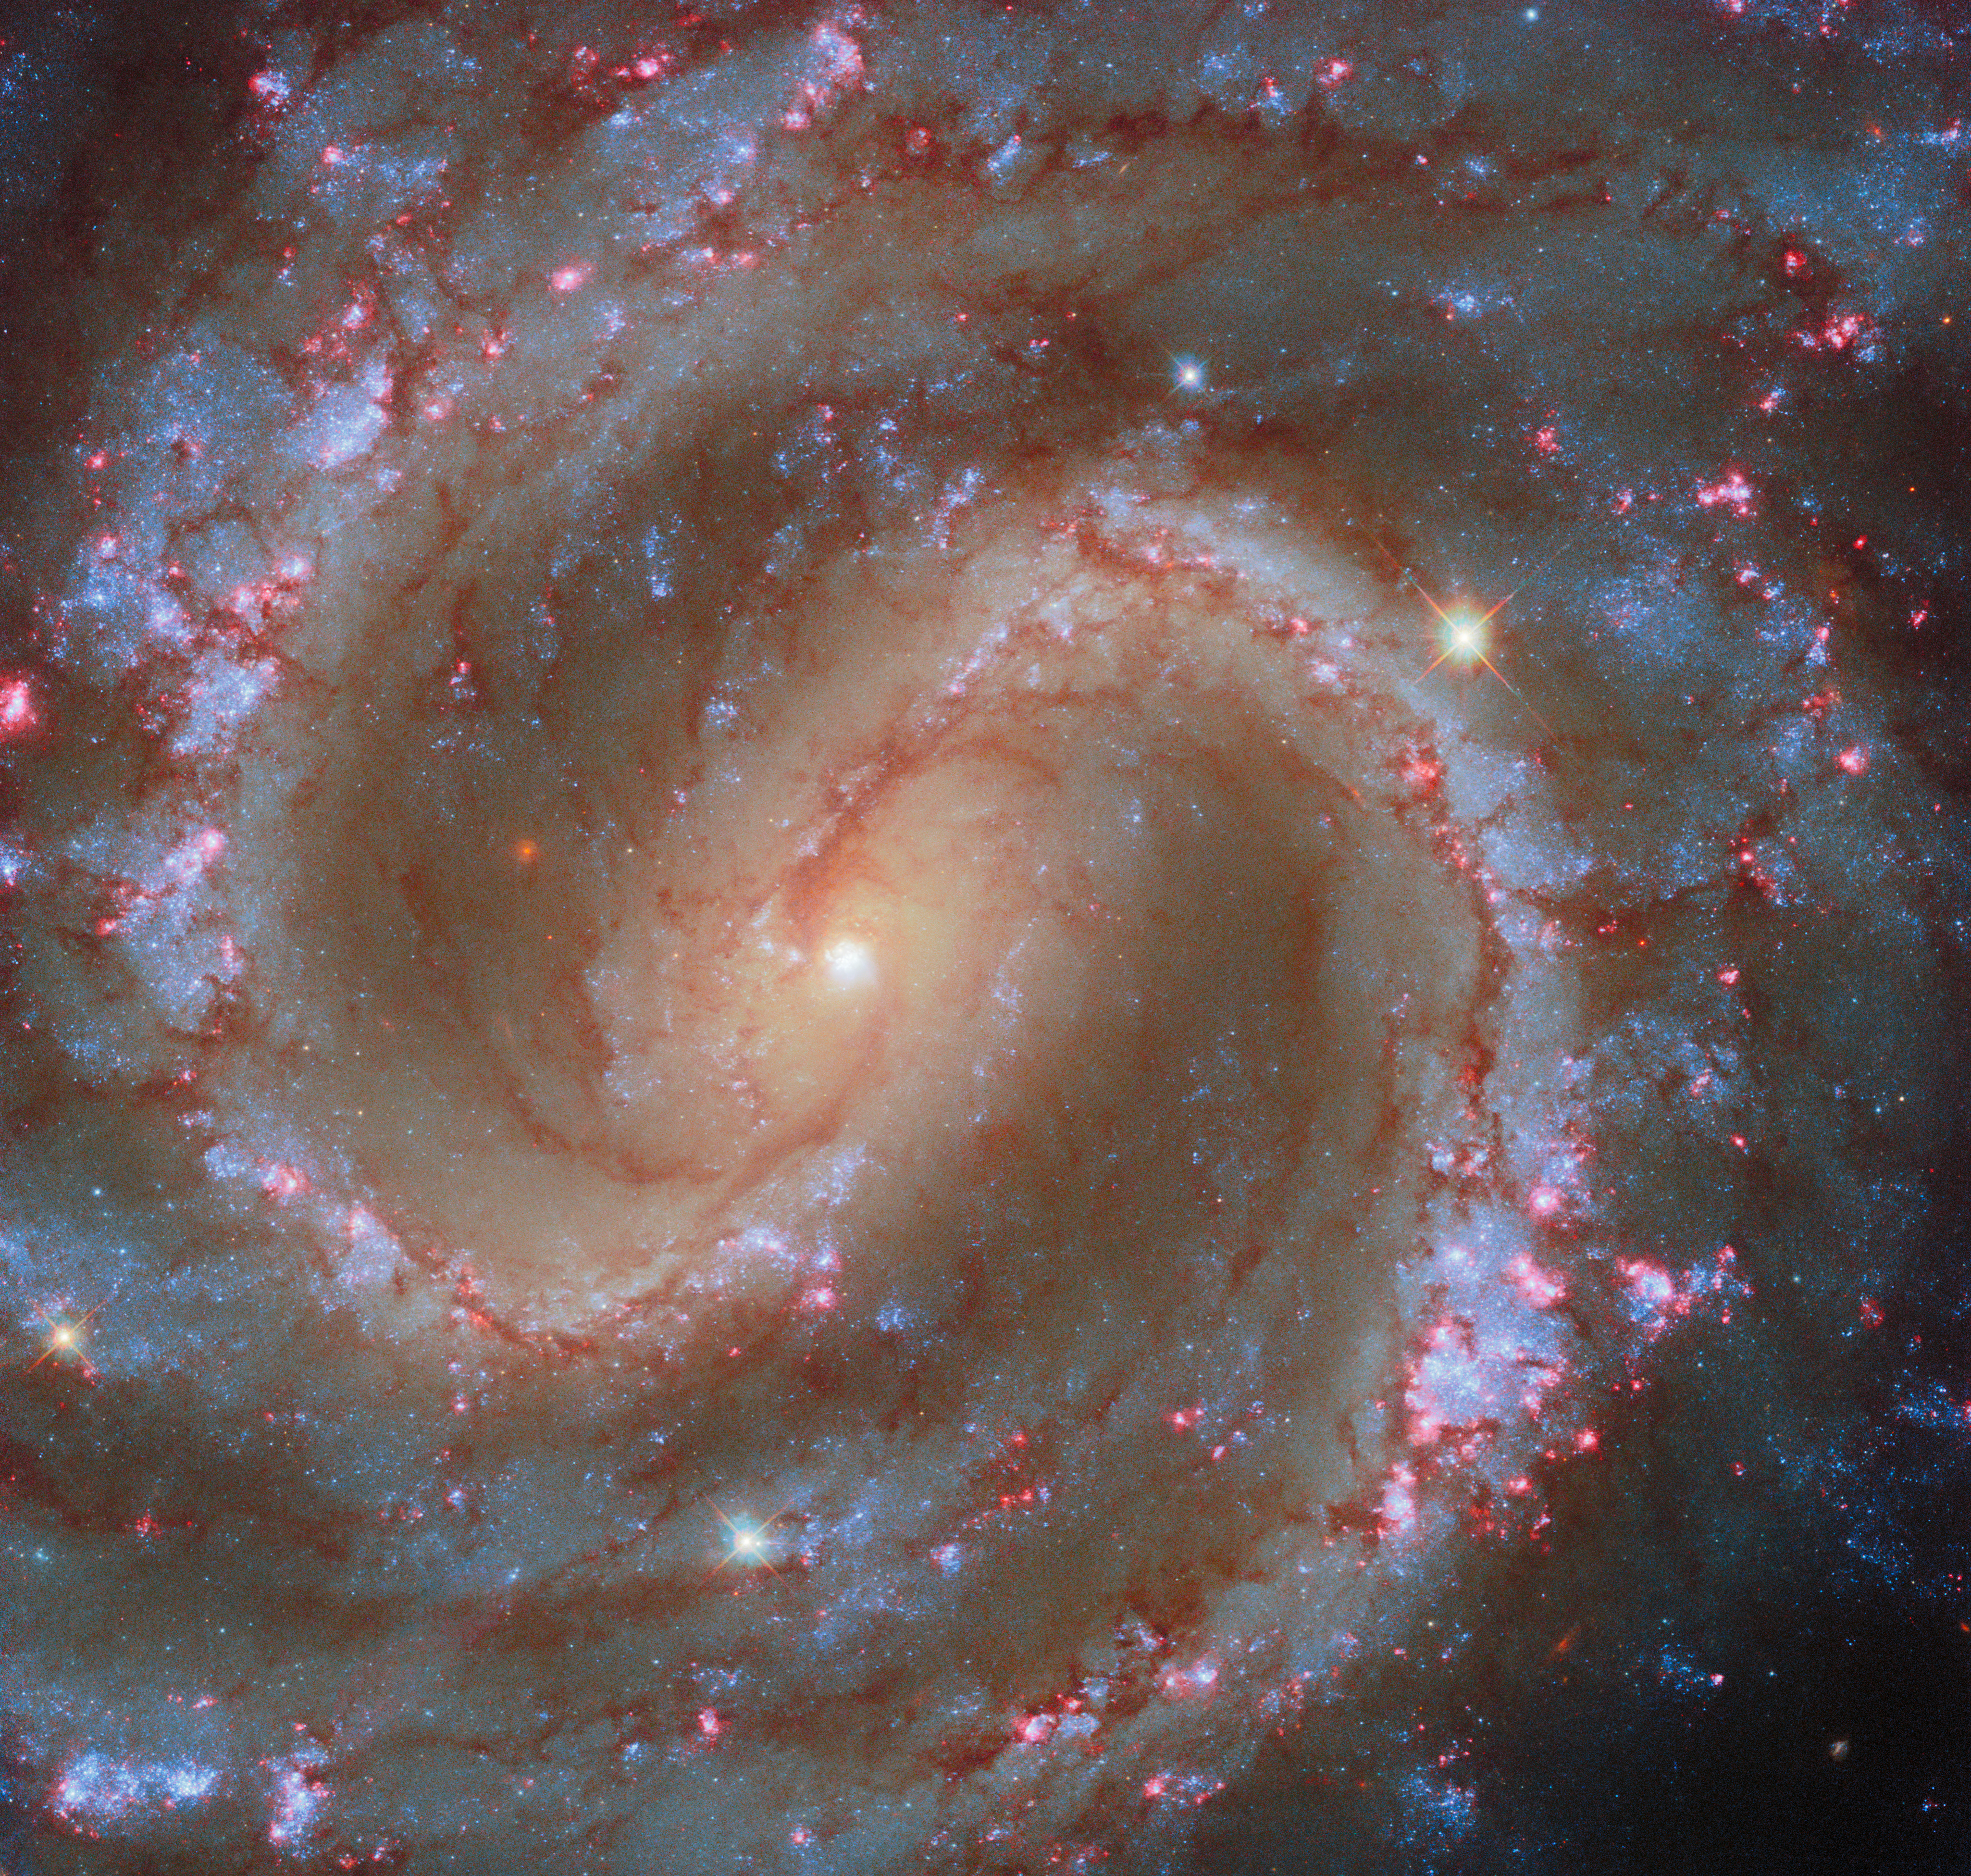

Finding star clusters in the Lost Galaxy

Today’s ESA/Hubble Picture of the Week features the spiral galaxy NGC 4535, which is situated about 50 million light-years away in the constellation Virgo (The Maiden). This galaxy has been nicknamed the ‘Lost Galaxy’ because it’s extremely faint when viewed through a small telescope. With a mirror spanning 2.4 metres across, Hubble is well equipped to observe dim galaxies like NGC 4535 and pick out features like its massive spiral arms and central bar of stars.

On full display in this Hubble image are NGC 4535’s young star clusters, which dot the galaxy’s spiral arms. Many of the groupings of bright blue stars are enclosed by glowing pink clouds. These clouds, called H II (‘H-two’) regions, are a sign that the galaxy is home to especially young, hot, and massive stars that are blazing with high-energy radiation. By heating the clouds in which they were born, shooting out powerful stellar winds, and eventually exploding as supernovae, massive stars certainly shake up their surroundings.

This Hubble image incorporates data from an observing programme that will catalogue roughly 50 000 H II regions in nearby star-forming galaxies like NGC 4535. A previous image of NGC 4535 was released in 2021. Both the 2021 image and today’s image incorporate observations from the PHANGS programme, which seeks to understand the connections between young stars and cold gas. Today’s image adds a new dimension to our understanding of NGC 4535 by capturing the brilliant red glow of the nebulae that encircle massive stars in their first few million years of life.

Credit: ESA/Hubble & NASA, F. Belfiore, J. Lee and the PHANGS-HST Team